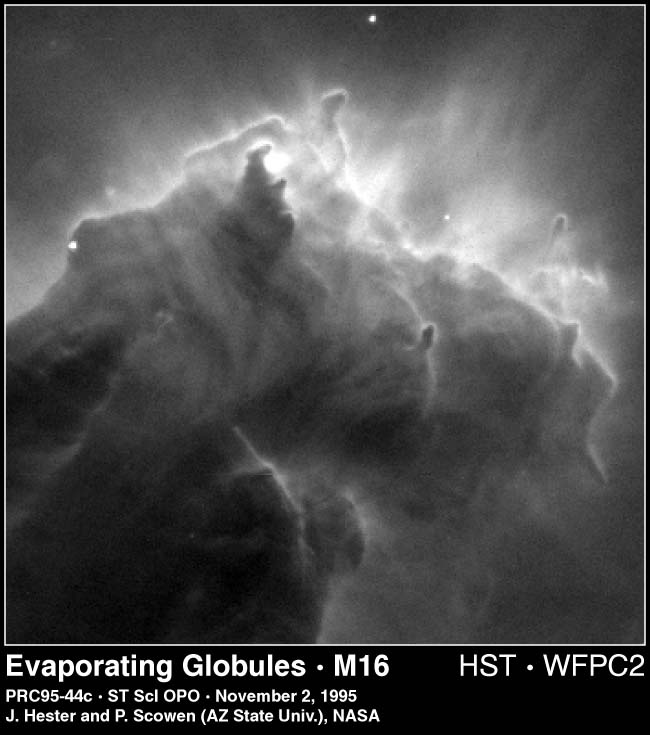

Evaporating globules in M16

This eerie, dark structure, resembling an imaginary sea serpent's head, is a column of cool molecular hydrogen gas (two atoms of hydrogen in each molecule) and dust that is an incubator for new stars. The stars are embedded inside finger-like protrusions extending from the top of the nebula. Each 'fingertip' is somewhat larger than our own solar system.

Credit: Jeff Hester and Paul Scowen (Arizona State University), and NASA/ESA